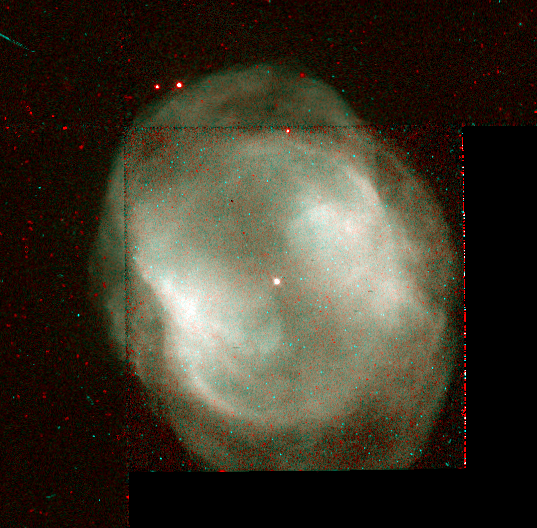

NGC 3195

This image is a part of the Hubble Gallery of Planetary Nebulae.

Credit: Howard Bond (ST ScI) and NASA/ESA